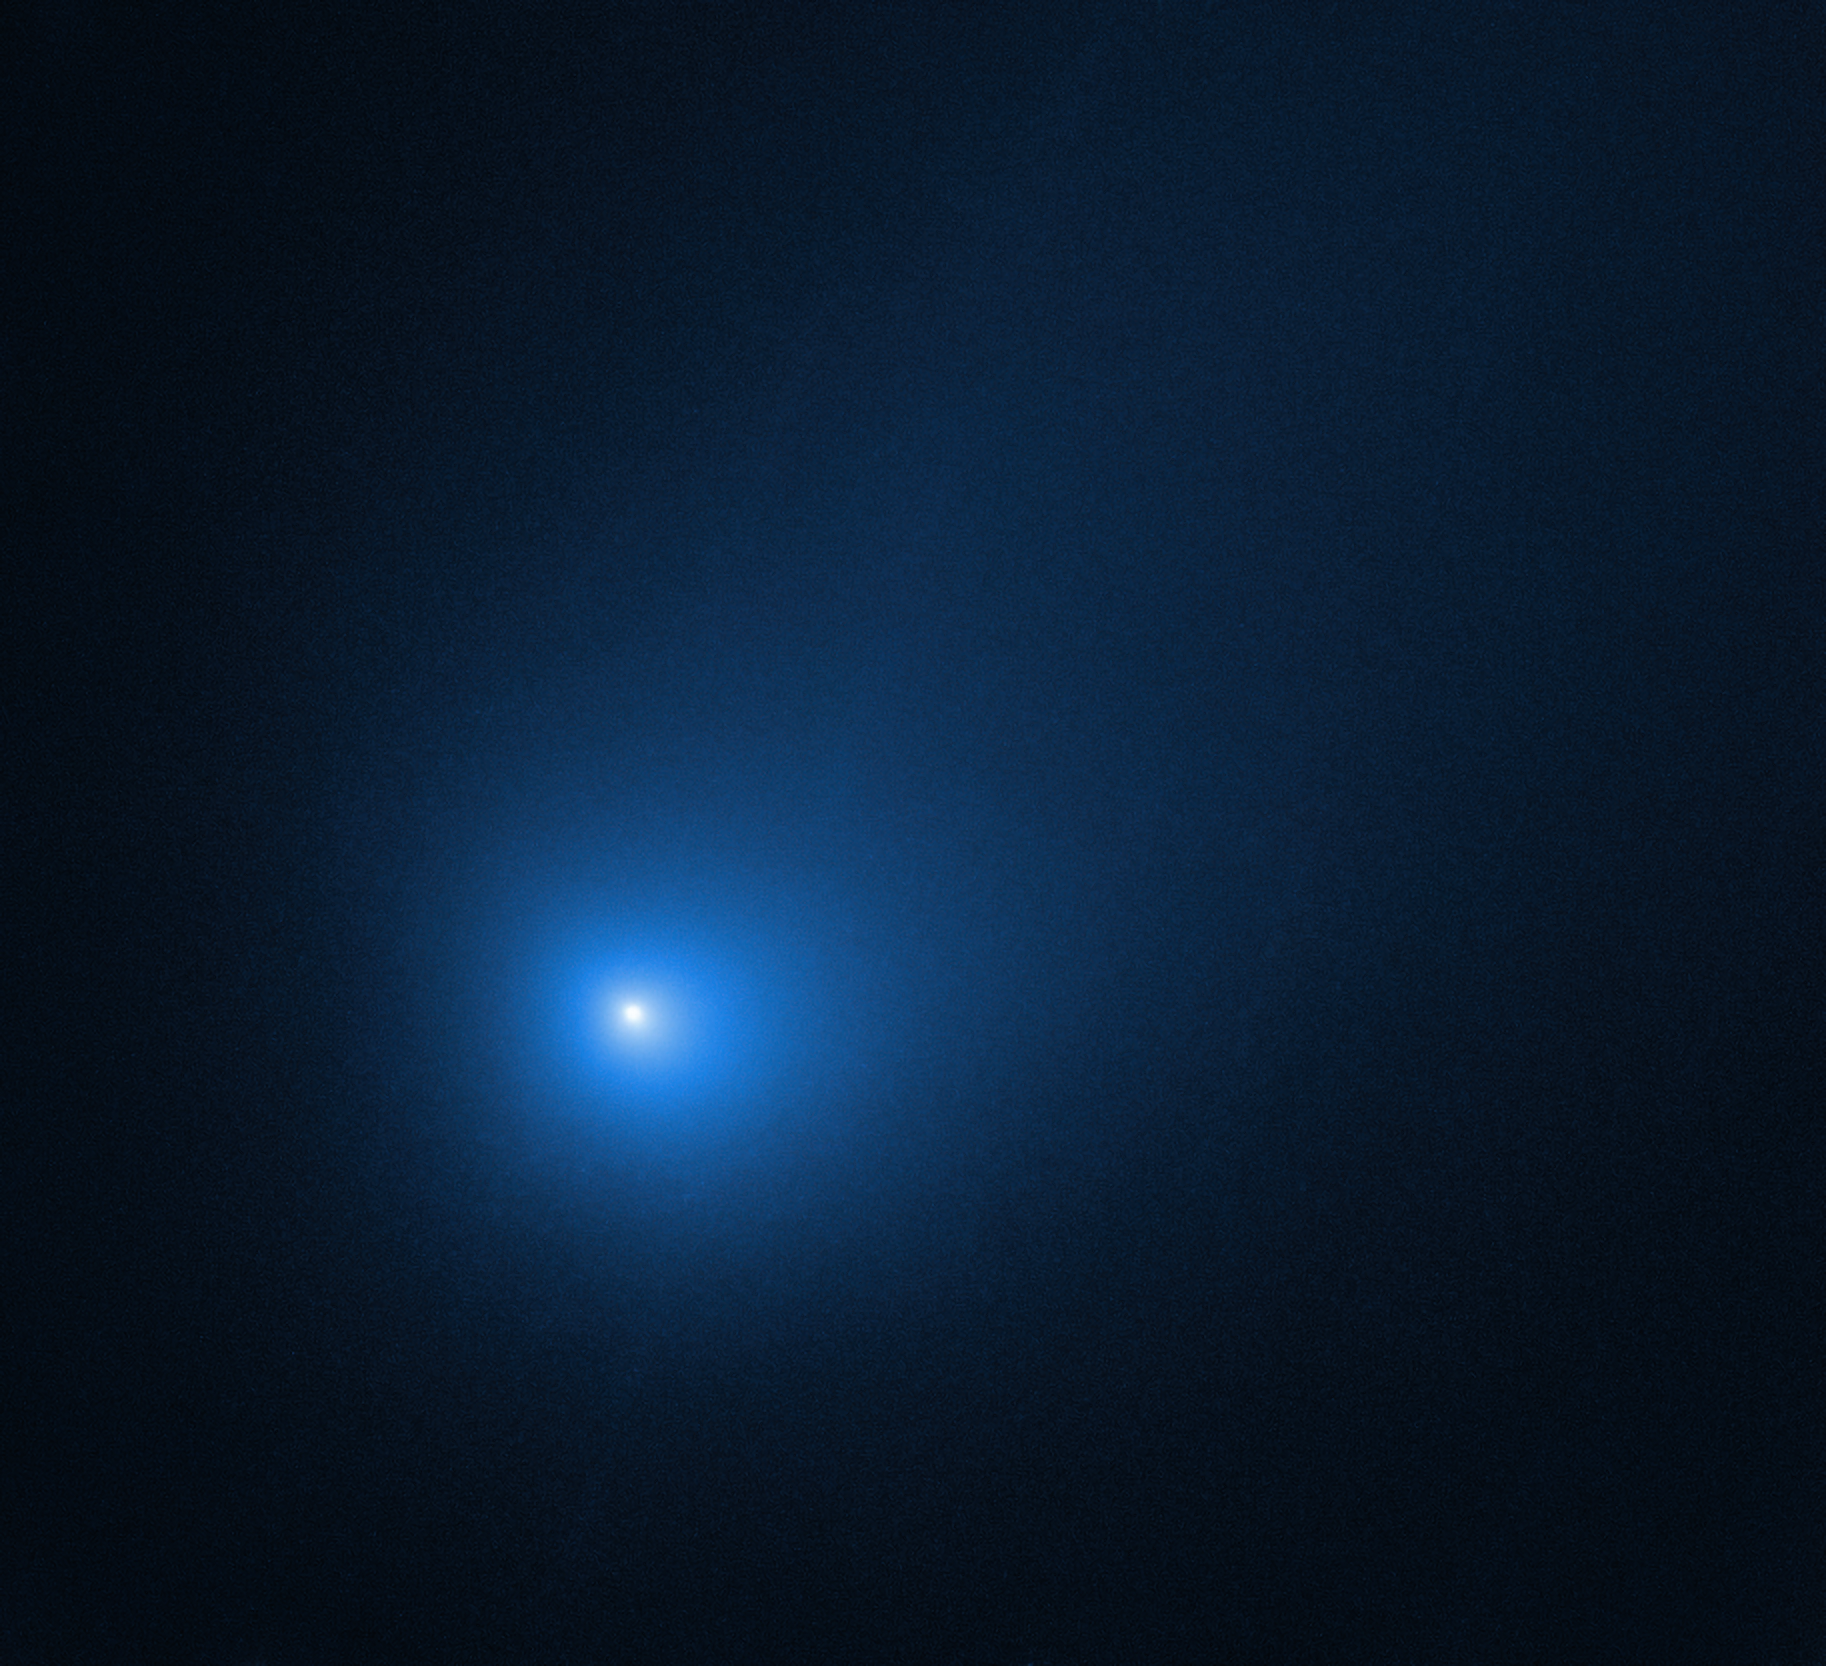

Comet 2I/Borisov at Perihelion in December 2019

Comet 2I/Borisov is only the second interstellar object known to have passed through our Solar System.

In this observation, the NASA/ESA Hubble Space Telescope revisited the comet shortly after its closest approach to the Sun. There it was subjected to a greater degree of heating than it had ever experienced, after spending most of its life in the extreme cold of interstellar space. The comet is 298 million kilometres from Earth in this photo, near the inner edge of the asteroid belt. The nucleus, an agglomeration of ices and dust, is still too small to be resolved. The bright central portion is a coma made up of dust leaving the surface. The comet will make its closest approach to Earth in late December, when it will be at a distance of 290 million kilometres.

Credit: NASA, ESA, and D. Jewitt (UCLA)